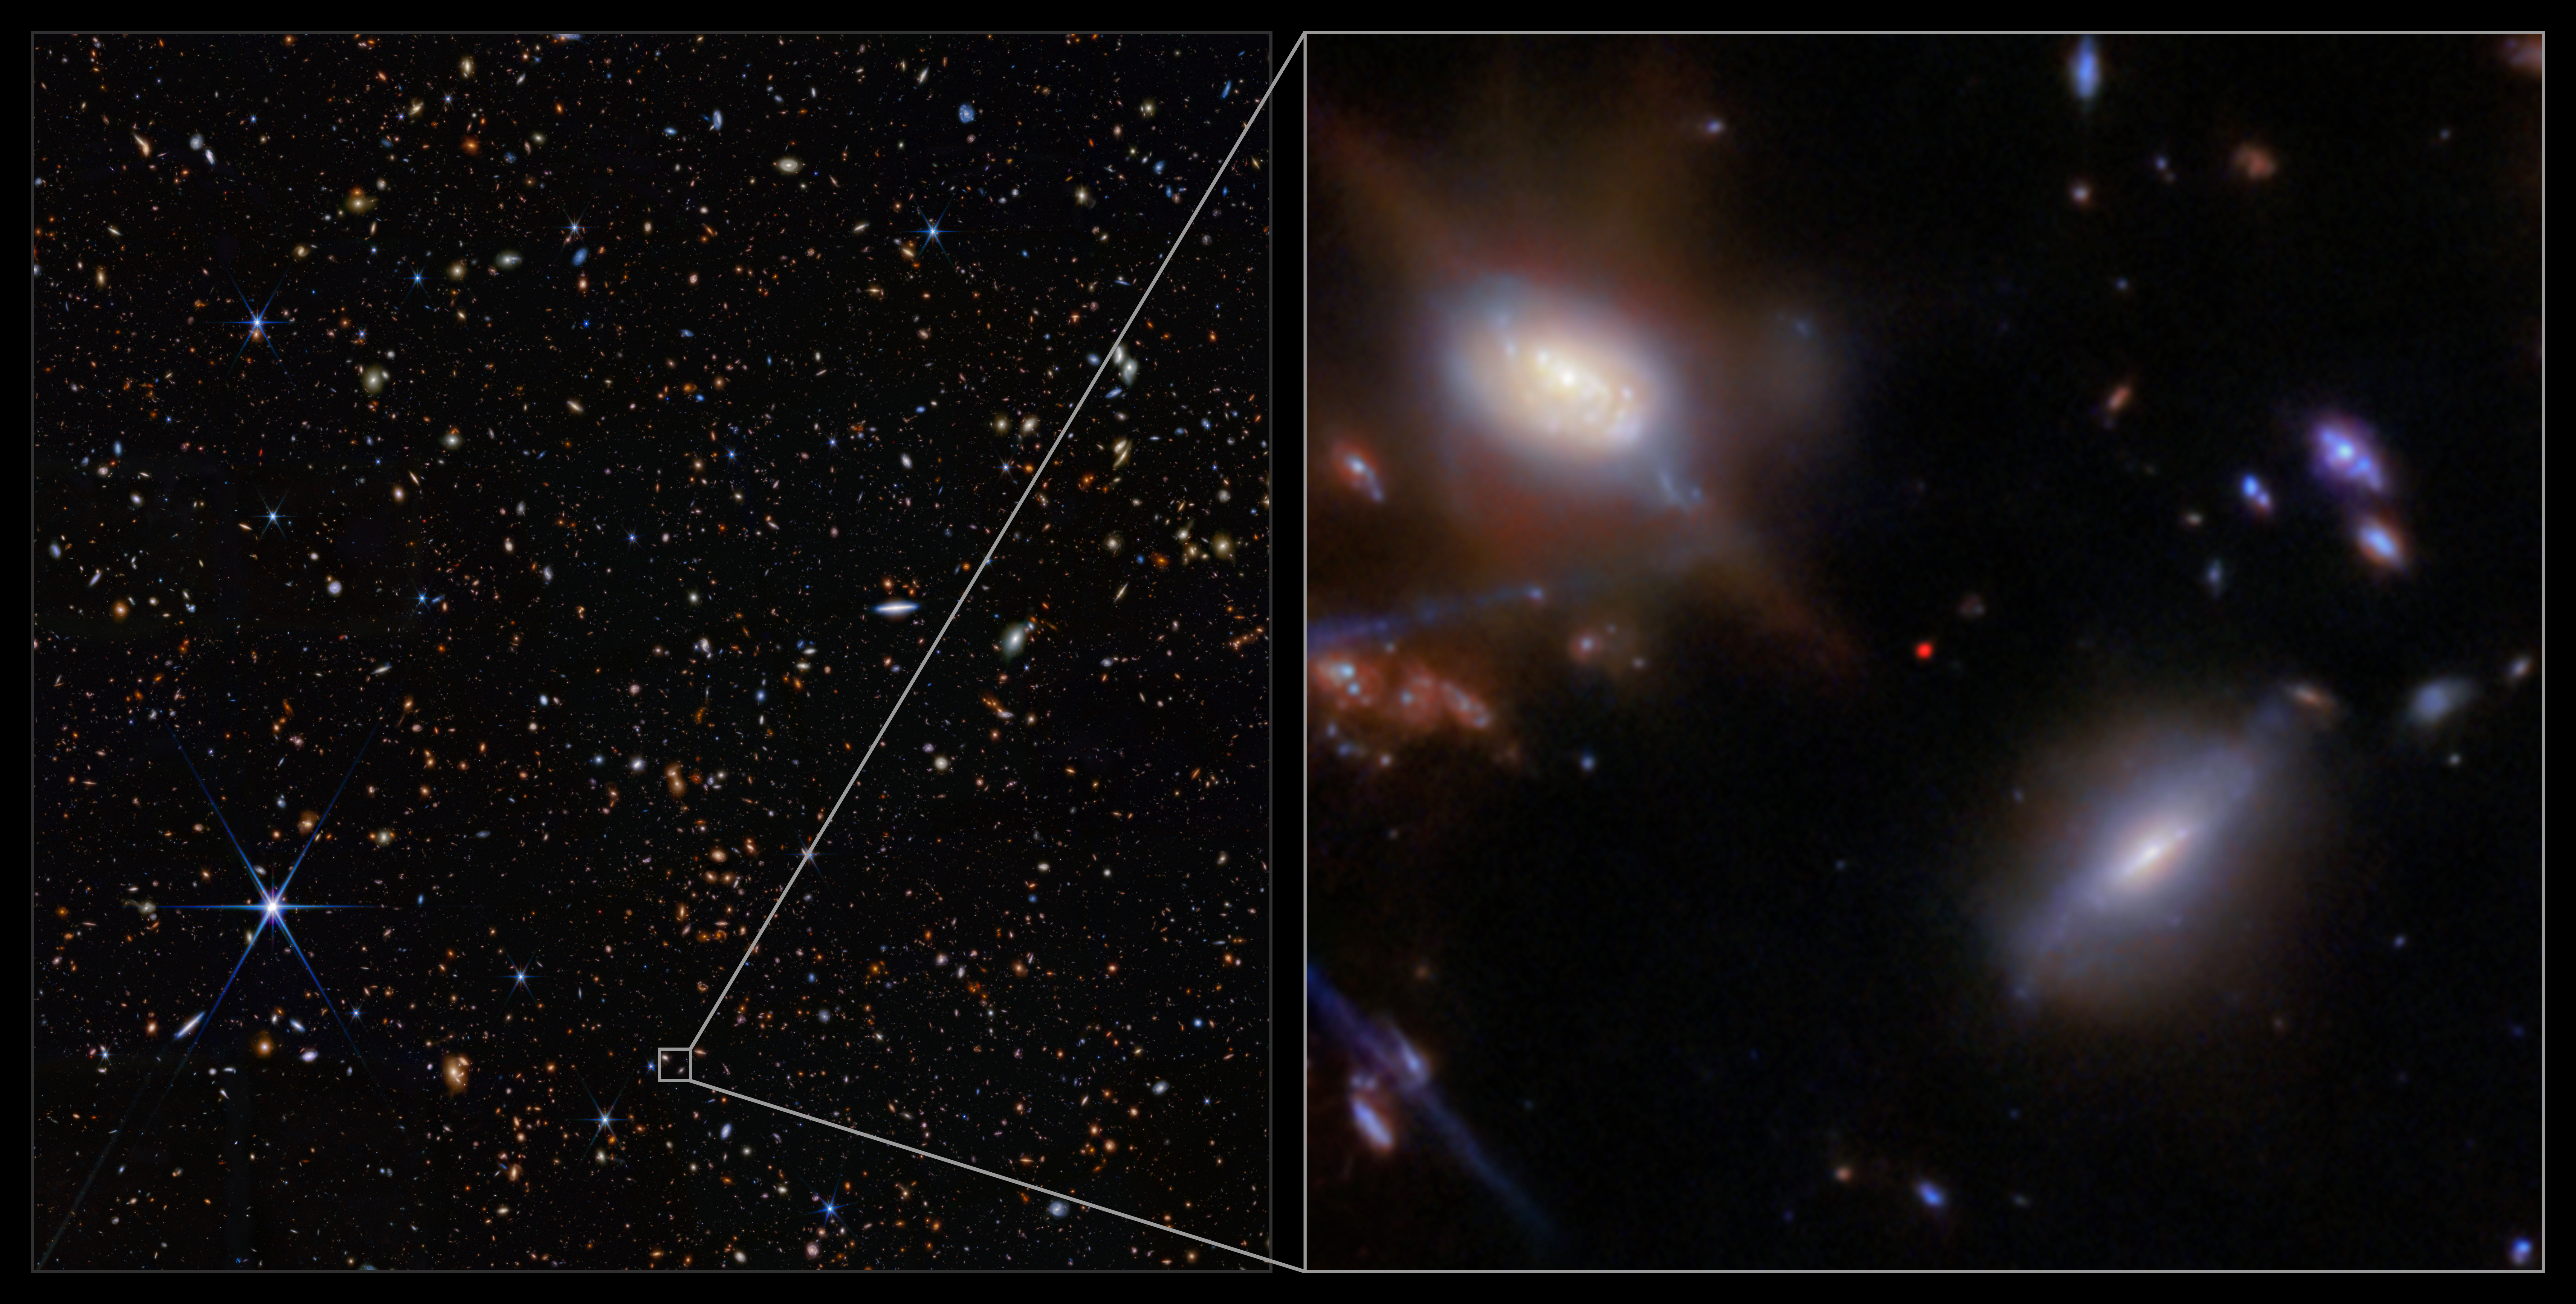

JADES-GS-z13-1 in the GOODS-S field (NIRCam image, clean)

The incredibly distant galaxy GS-z13-1, observed just 330 million years after the Big Bang, was initially discovered with deep imaging from the NASA/ESA/CSA James Webb Space Telescope. Now, an international team of astronomers has definitively identified powerful hydrogen emission from this galaxy at an unexpectedly early period in the Universe’s history, a probable sign that we are seeing some of the first hot stars from the dawn of the Universe.

This image shows the location of the galaxy GS-z13-1 in the GOODS-S field, as well as the galaxy itself, imaged with Webb’s Near-Infrared Camera (NIRCam) as part of the JWST Advanced Deep Extragalactic Survey (JADES) programme. These data from NIRCam allowed researchers to identify GS-z13-1 as an incredibly distant galaxy, and to put an estimate on its redshift value. Webb’s unique infrared sensitivity is necessary to observe galaxies at this extreme distance, whose light has been redshifted into infrared wavelengths during its long journey across the cosmos.

To confirm the galaxy’s redshift, the team turned to Webb’s Near-Infrared Spectrograph (NIRSpec) instrument. With new observations permitting advanced spectroscopy of the galaxy’s emitted light, the team not only confirmed GS-z13-1’s redshift of 13.0, they also revealed the strong presence of a type of ultraviolet radiation called Lyman-α emission. This is a telltale sign of the presence of newly forming stars, or a possible active galactic nucleus in the galaxy, but at a much earlier time than astronomers had thought possible. The result holds great implications for our understanding of the Universe.

Credit: ESA/Webb, NASA & CSA, JADES Collaboration, J. Witstok, P. Jakobsen, A. Pagan (STScI), M. Zamani (ESA/Webb)